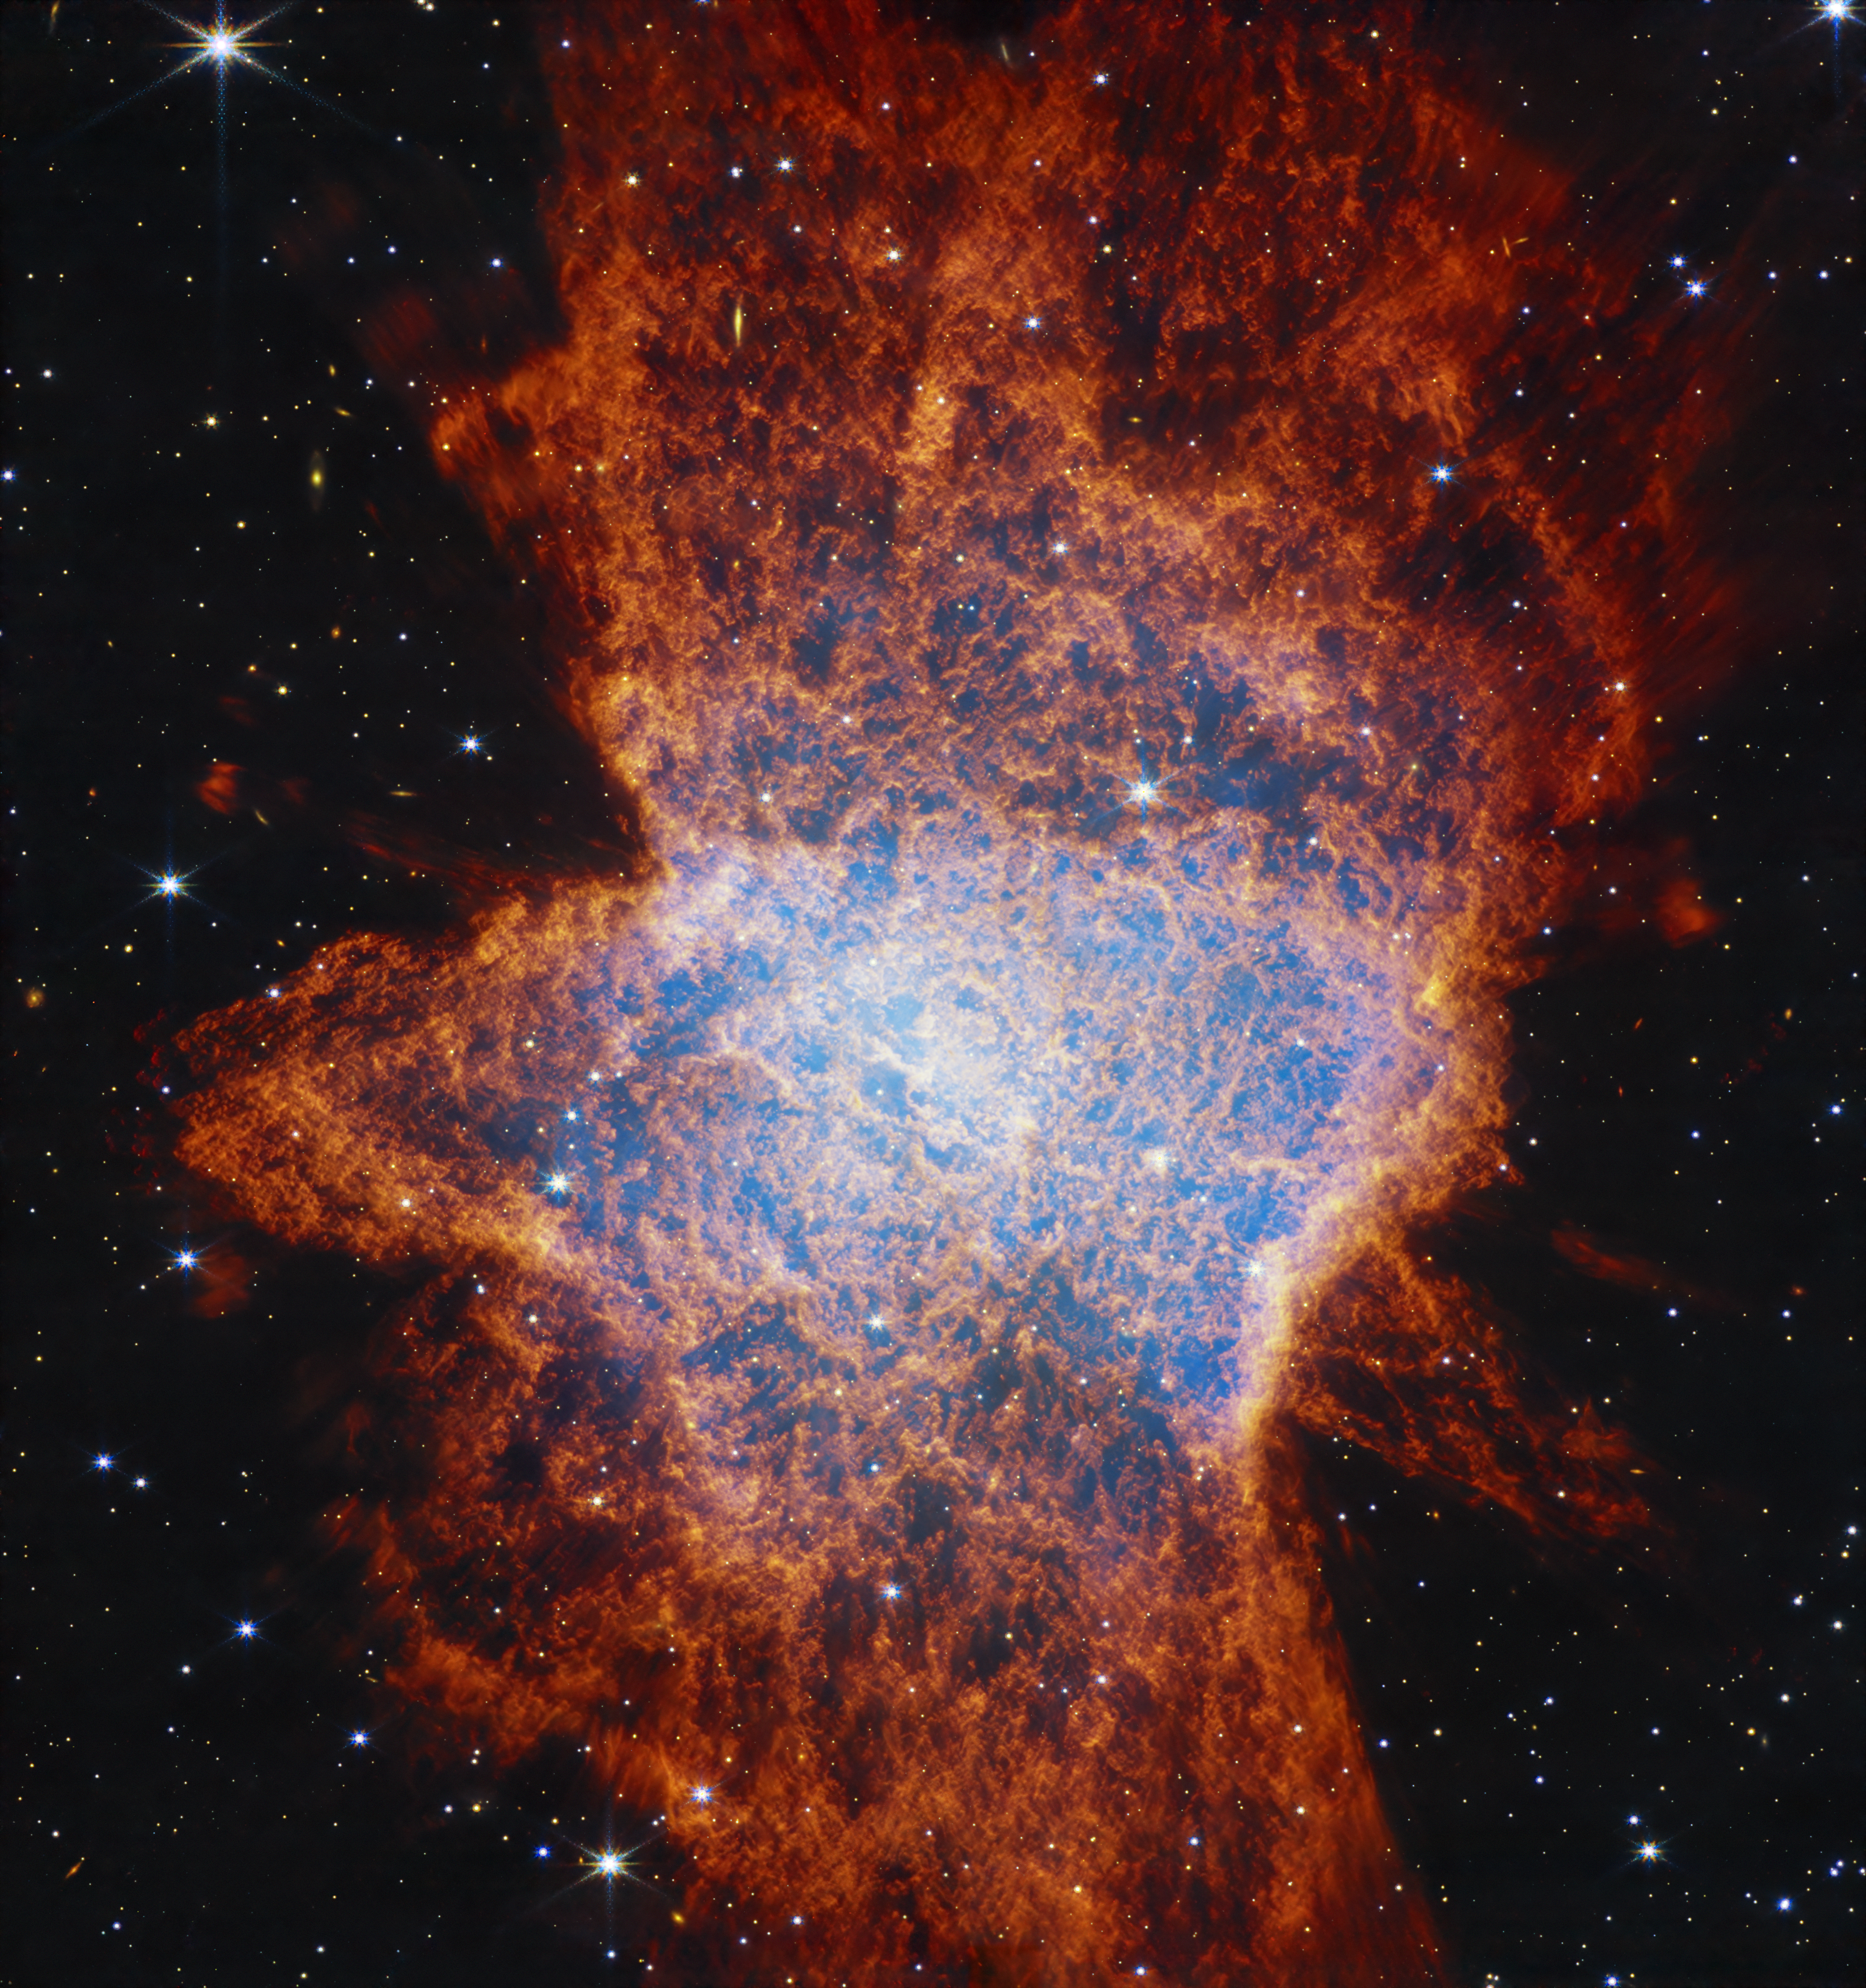

NGC 6072 (NIRCam image)

The NASA/ESA/CSA James Webb Space Telescope’s view of planetary nebula NGC 6072 in the near-infrared shows a complex scene of multiple outflows expanding out at different angles from a dying star at the centre of the scene. These outflows push gas toward the equatorial plane, forming a disc.

Astronomers suspect there is at least one other star interacting with the material cast off by the central dying star, creating the abnormal appearance of this planetary nebula.

In this image, the red areas represent cool molecular gas, for example, molecular hydrogen.

Credit: NASA, ESA, CSA, STScI